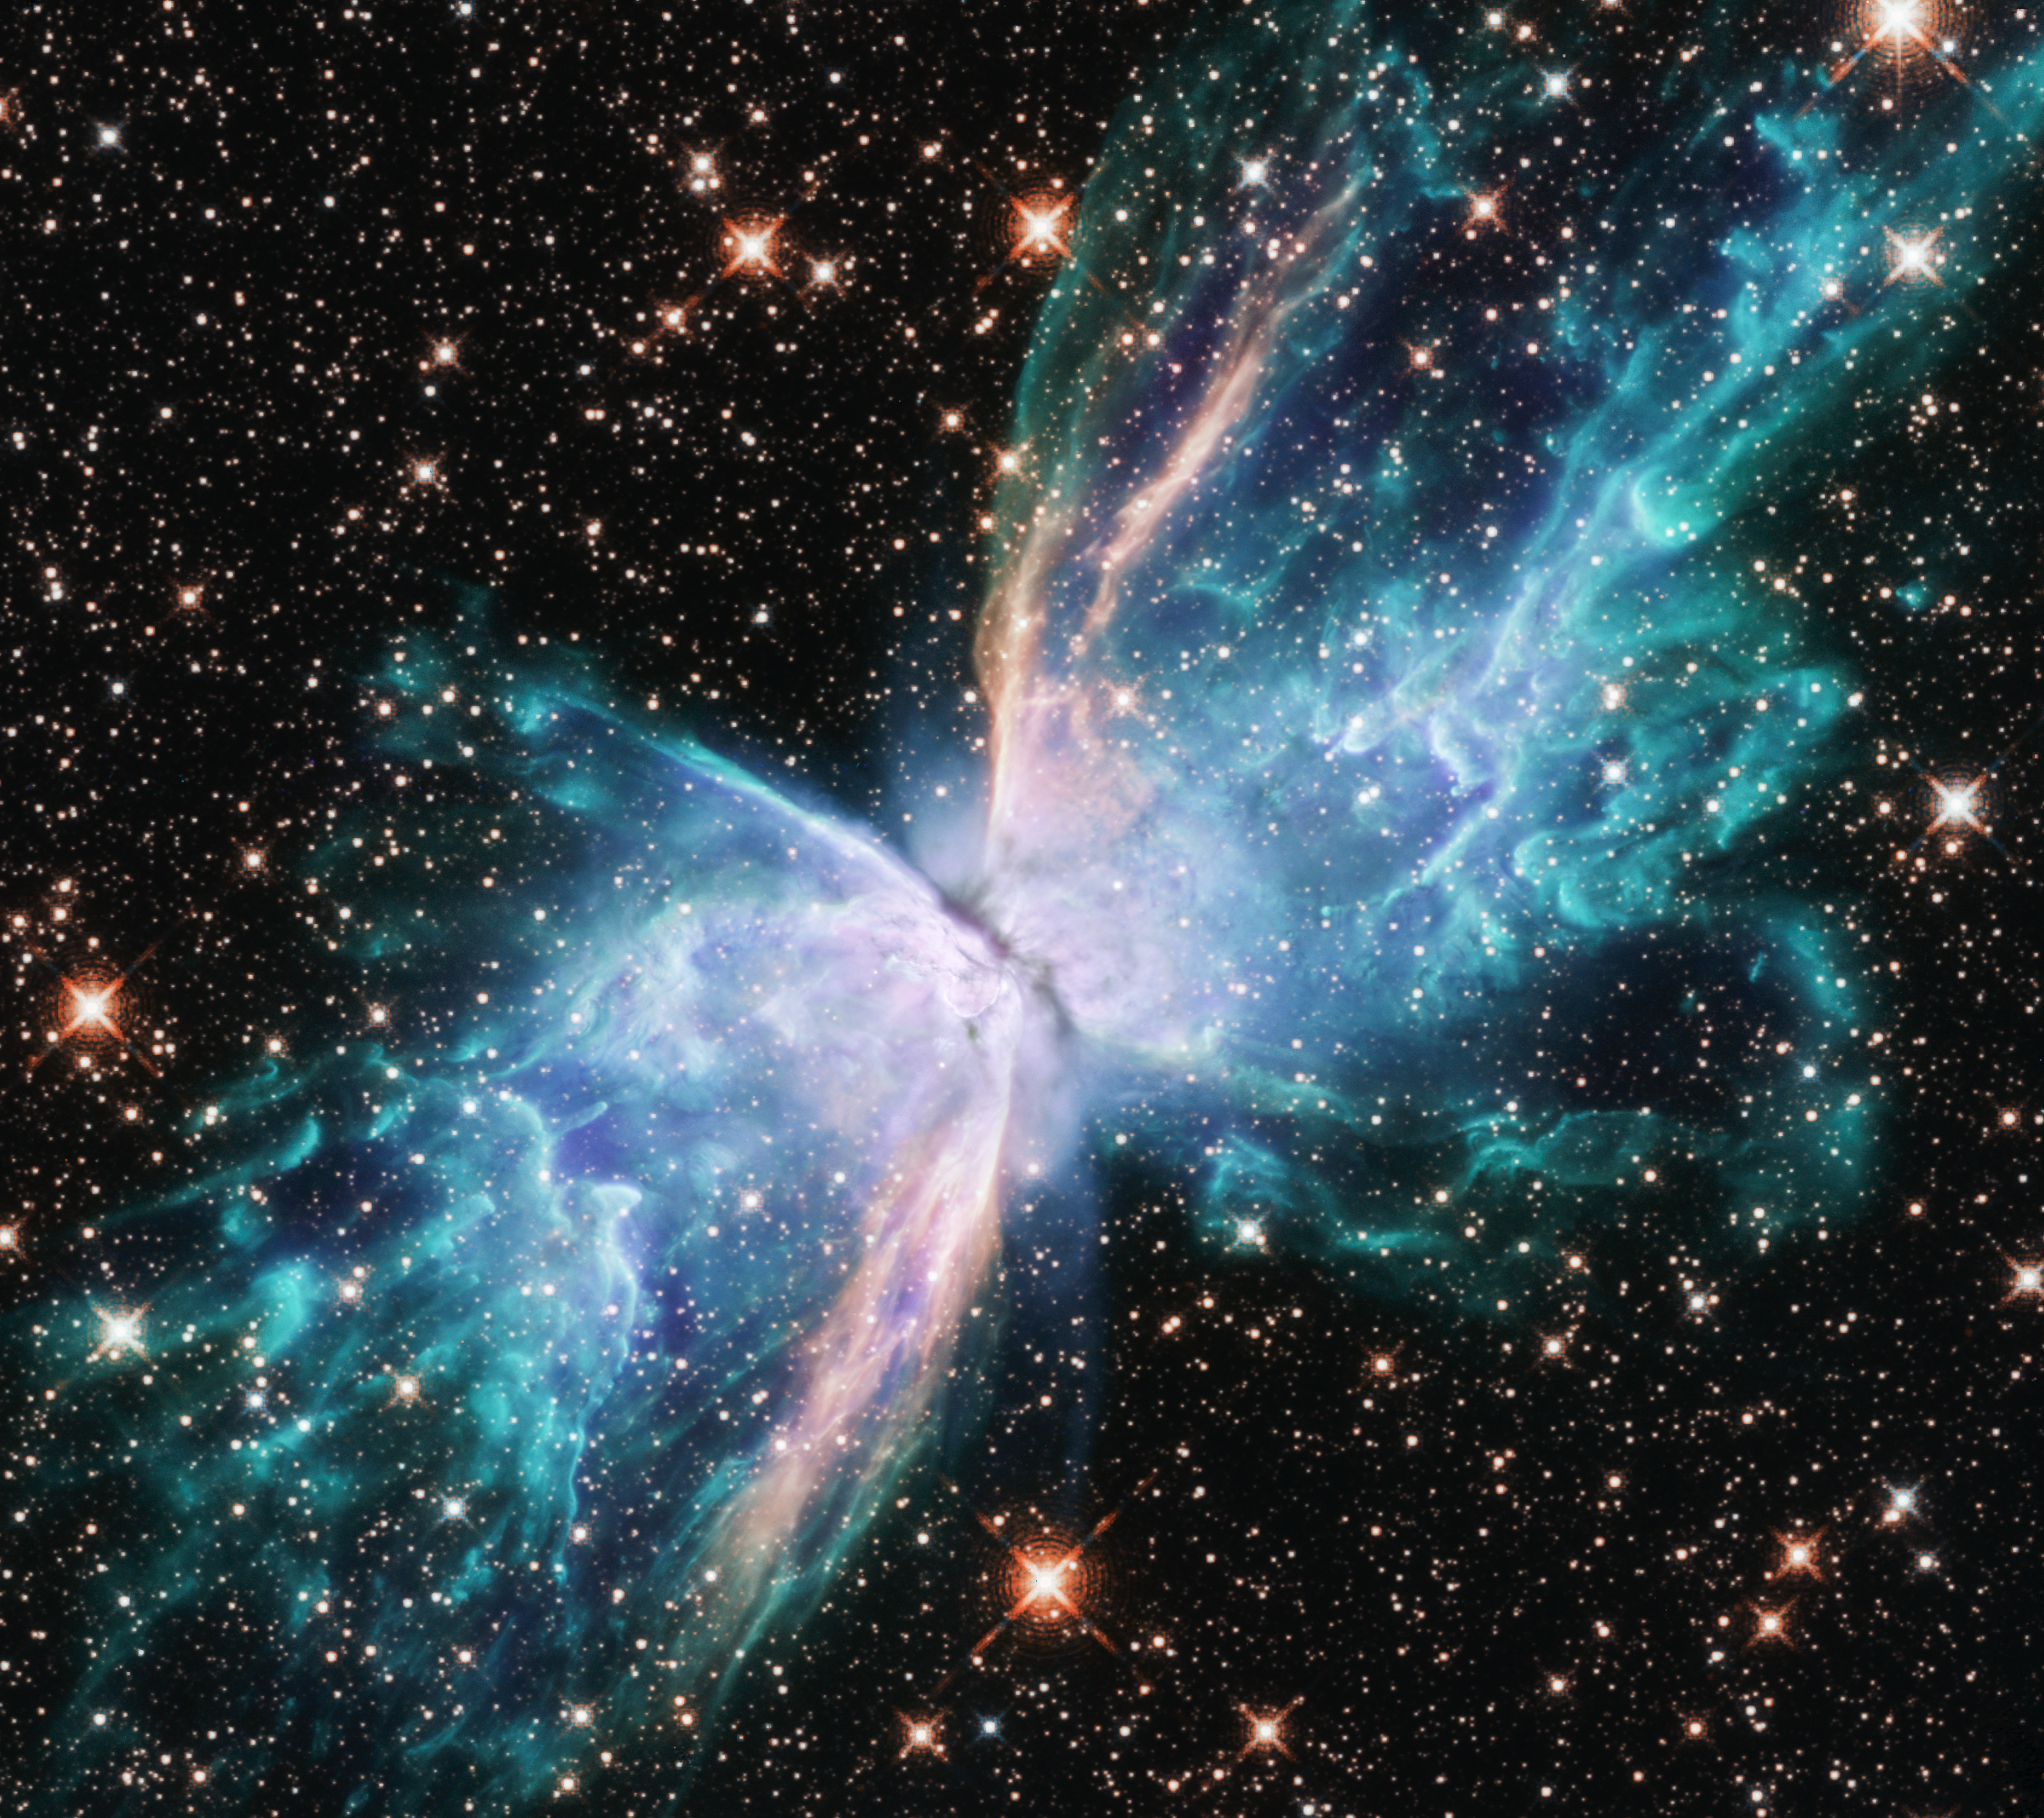

NGC 6302

This image from the NASA/ESA Hubble Space Telescope depicts NGC 6302, commonly known as the Butterfly Nebula. NGC 6302 lies within our Milky Way galaxy, roughly 3800 light-years away in the constellation of Scorpius. The glowing gas was once the star's outer layers, but has been expelled over about 2200 years. The butterfly shape stretches for more than two light-years, which is about half the distance from the Sun to the nearest star, Proxima Centauri.

New observations of the object have found unprecedented levels of complexity and rapid changes in the jets and gas bubbles blasting off of the star at the centre of the nebula.

Credit: NASA, ESA, and J. Kastner (RIT)